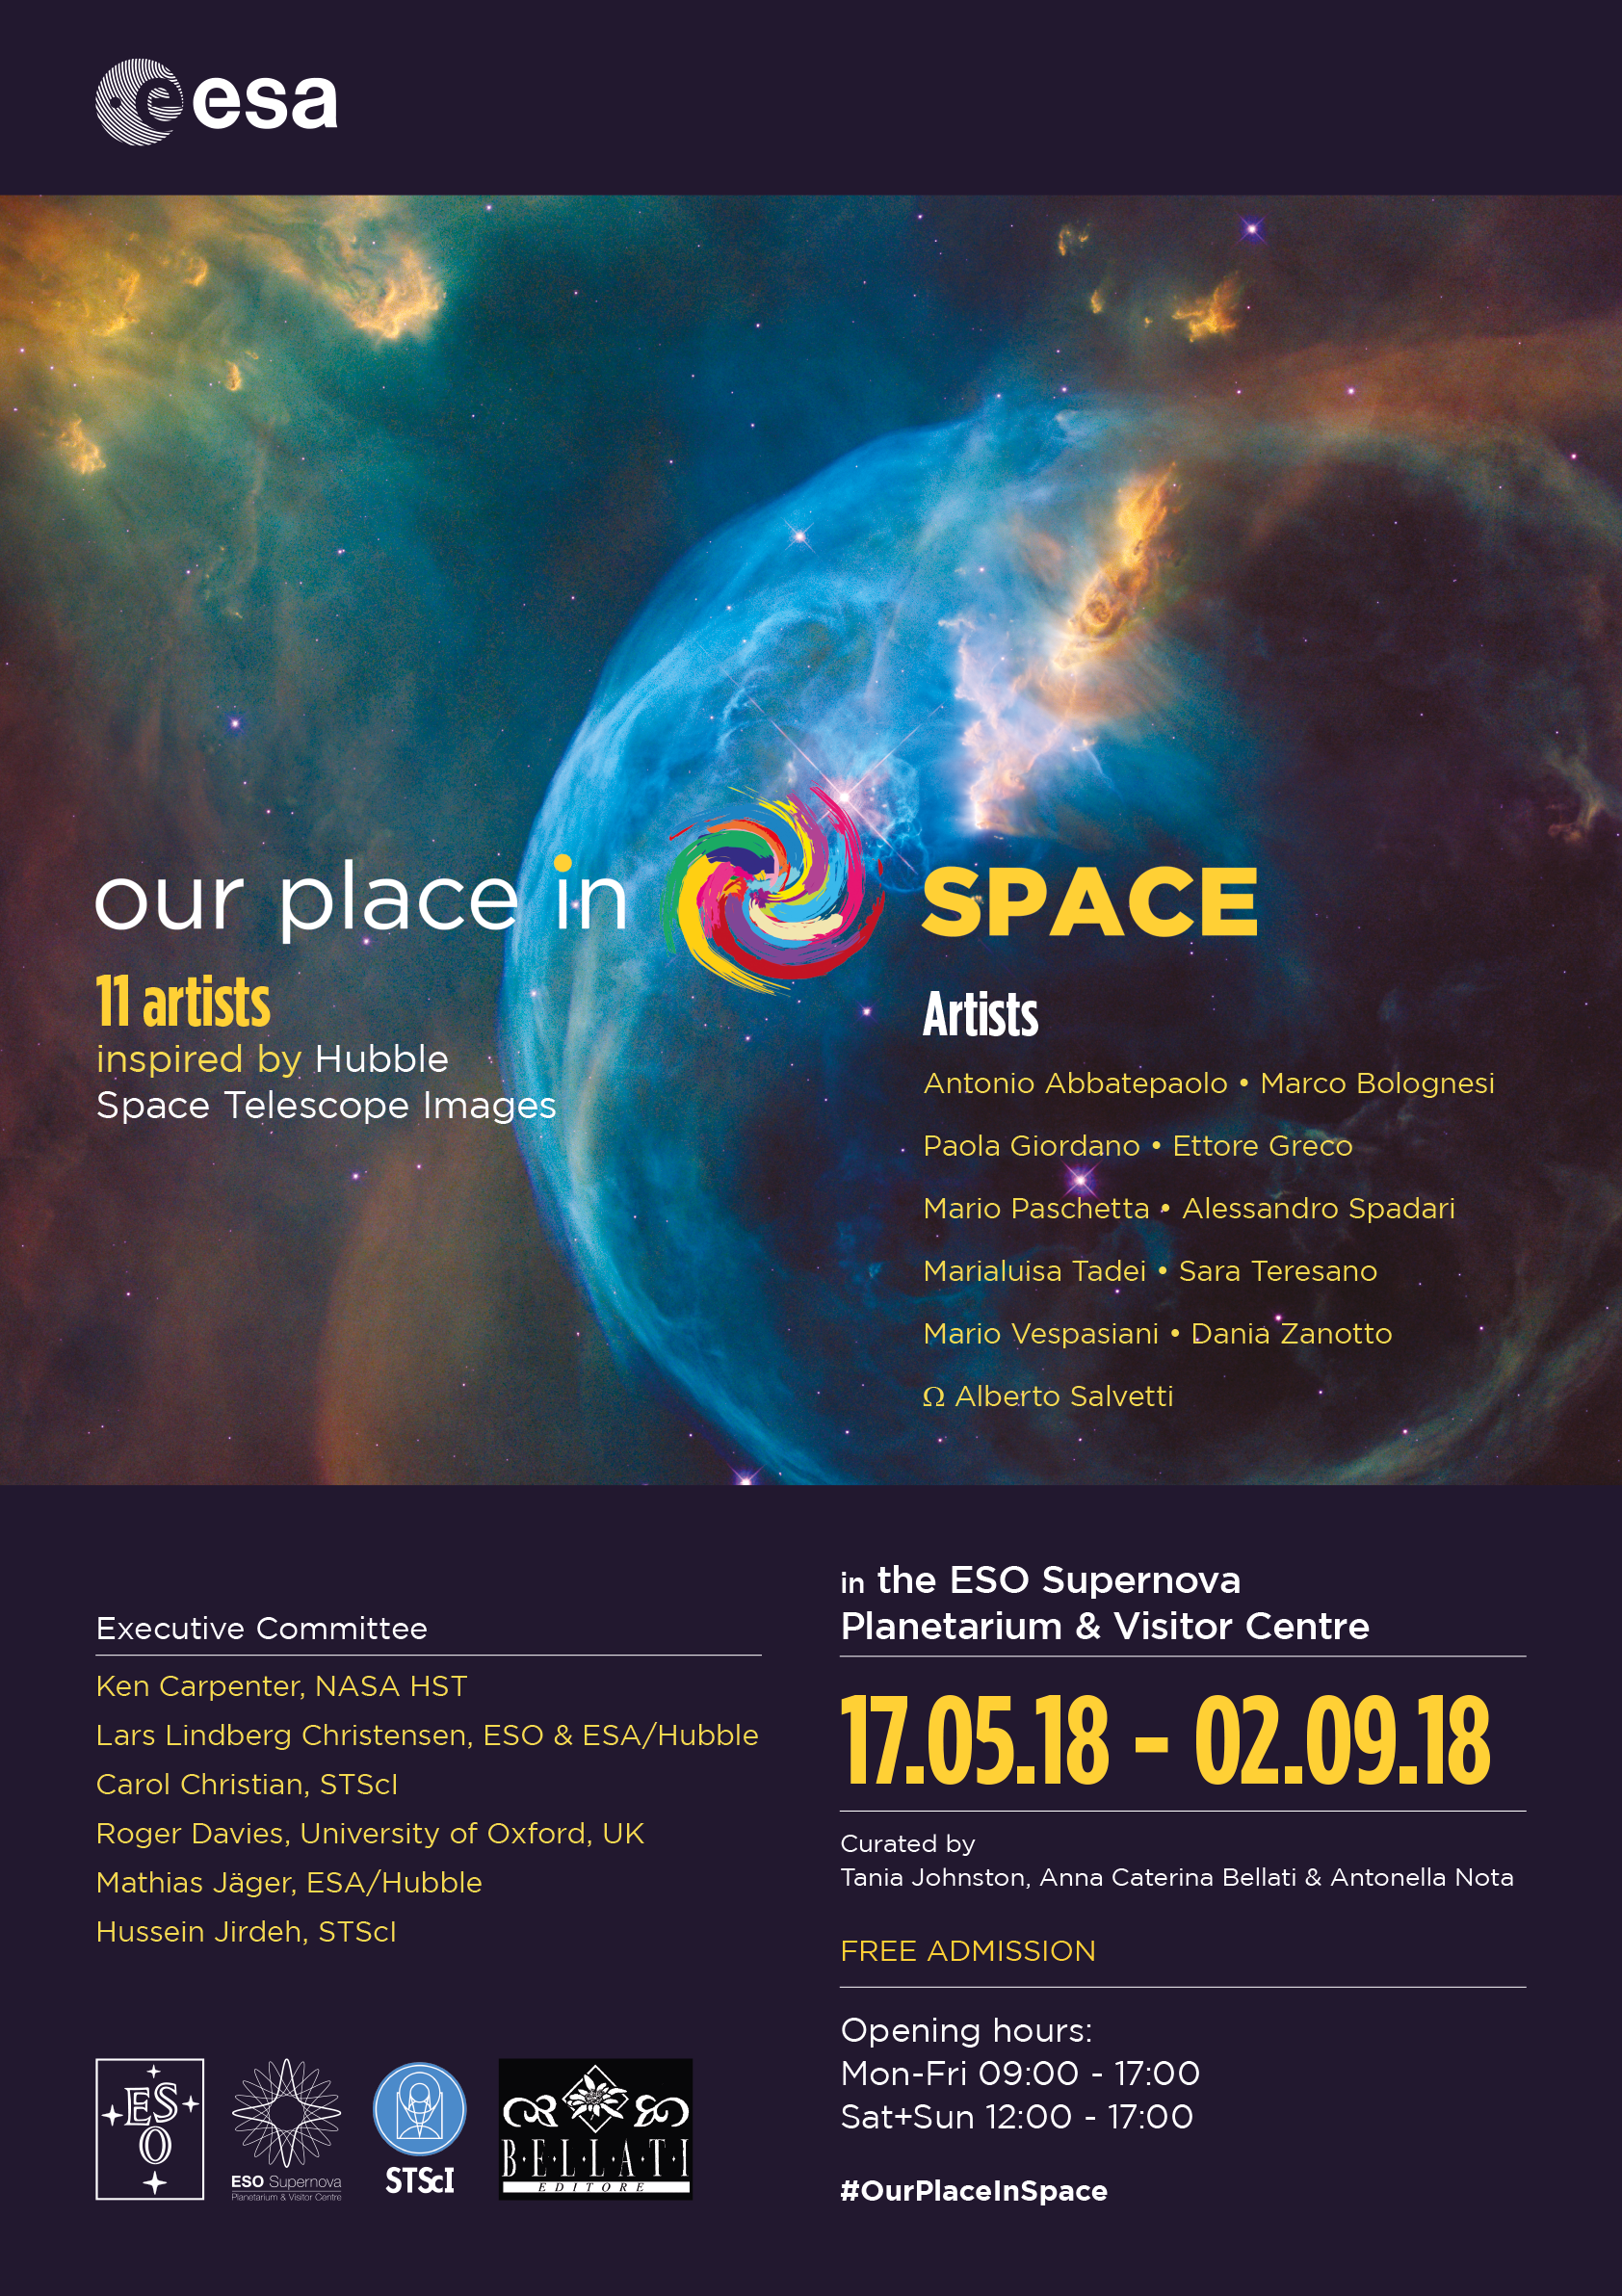

Our Place in Space poster for Garching

This is the official poster for Our Place in Space in Garching.

Credit: ESA/Hubble